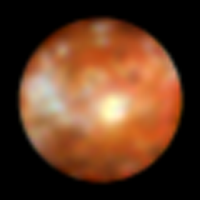

Changes on the Surface of Io

This Hubble Space Telescope image of Jupiter's volcanic moon Io shows the surprising emergence of a 200-mile diameter large yellowish-white feature near the center of the moon's disk.

Credit: J. Spencer (Lowell Observatory), and NASA/ESA